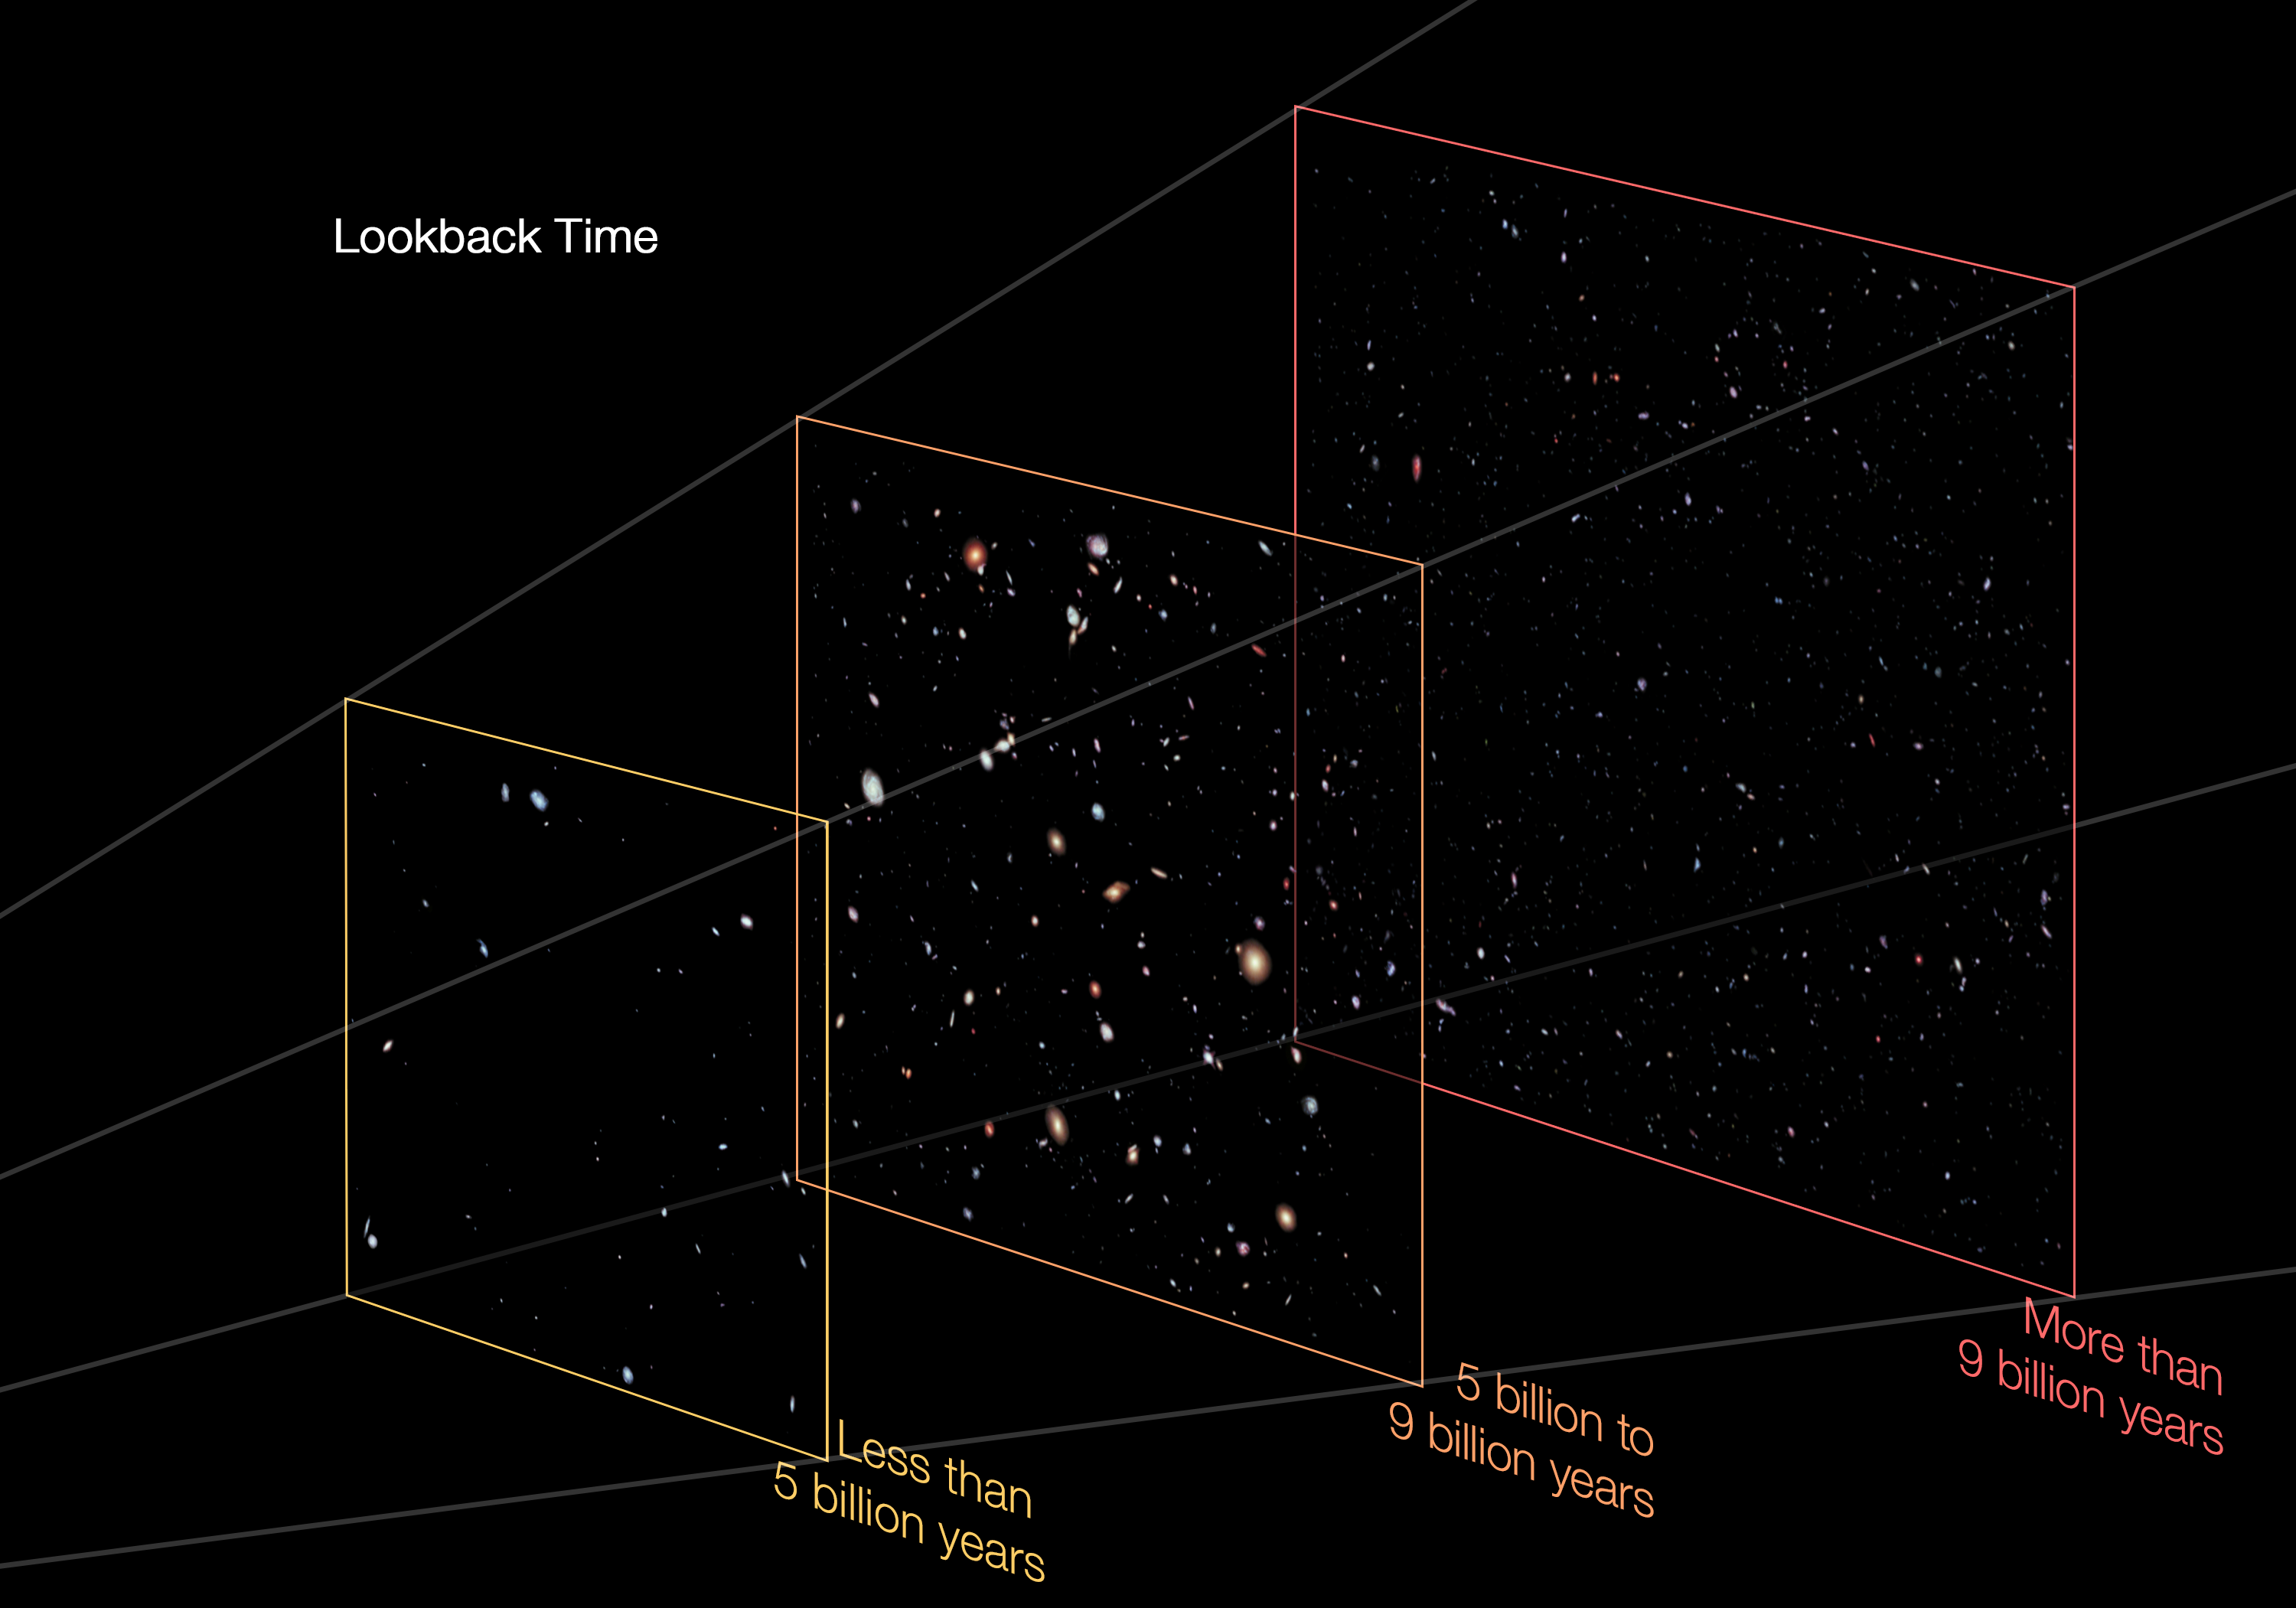

Distances in the Hubble eXtreme deep field

This image separates out the Hubble eXtreme Deep Field by the distances of objects within it.

The galaxies in the XDF are not close together — they lie along one long line of sight from Earth to the very edges of the visible Universe. The most distant objects within the XDF are more than 95% of the way back to the Big Bang, while a few stars in it are within the Milky Way.

In the left pane are objects whose light has taken less than 5 billion years to reach us. In the centre pane are objects whose light has taken 5 to 9 billion years to reach us. In the right pane are objects whose light has taken more than 9 billion years to reach us.

Credit: NASA, ESA, G. Illingworth, D. Magee, and P. Oesch (University of California, Santa Cruz), R. Bouwens (Leiden University), Z. Levay (STScI) and the HUDF09 Team